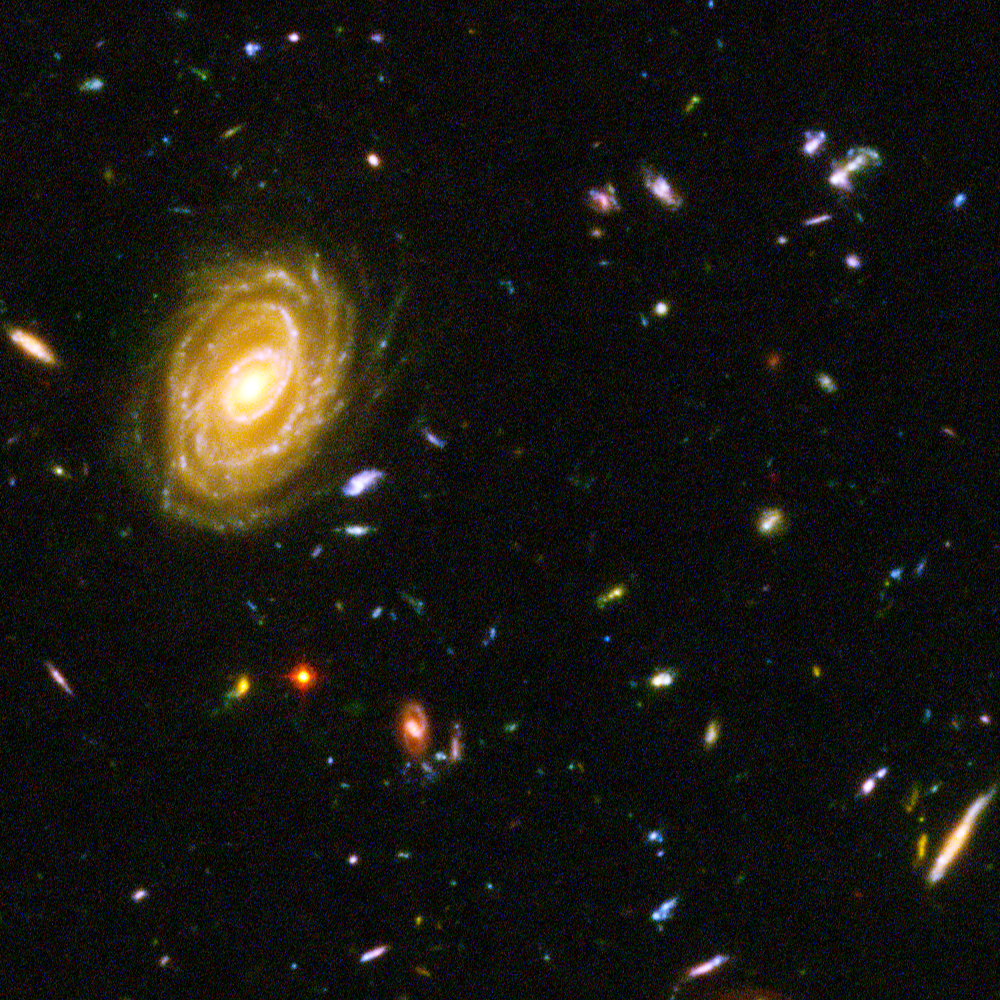

Hubble reveals galactic drama [image 3]

A galactic brawl. A close encounter with a spiral galaxy. Blue wisps of galaxies. These close-up snapshots of galaxies in the Hubble Ultra Deep Field reveal the drama of galactic life. Here a majestic spiral galaxy is seen - one of the nearest galaxies in the Ultra Deep Field. This galaxy existed about 1 billion years ago, when the cosmos was 13 billion years old. The smallest, reddest galaxies [the red dots] may be among the most distant known, existing when the cosmos was 800 million years old.

The galaxies in this panel were plucked from a harvest of nearly 10,000 galaxies in the Ultra Deep Field, the deepest visible-light image of the cosmos.

The Ultra Deep Field observations, taken by the Advanced Camera for Surveys, represent a narrow, "deep" view of the cosmos. Peering into the Ultra Deep Field is like looking through a 2.5 metre-long soda straw.

In ground-based images, the patch of sky in which the galaxies reside (just one-tenth the diameter of the full Moon) is largely empty. Located in the constellation Fornax, the region is so empty, in fact, that only a handful of stars within the Milky Way galaxy can be seen in the image.

In this image, blue and green correspond to colours that can be seen by the human eye, such as hot, young, blue stars and the glow of Sun-like stars in the disks of galaxies. Red represents near-infrared light, which is invisible to the human eye, such as the red glow of dust-enshrouded galaxies.

The image required 800 exposures taken over the course of 400 Hubble orbits around Earth. The total amount of exposure time was 11.3 days, taken between Sept. 24, 2003 and Jan. 16, 2004.

Credit: NASA, ESA, and S. Beckwith (STScI) and the HUDF Team